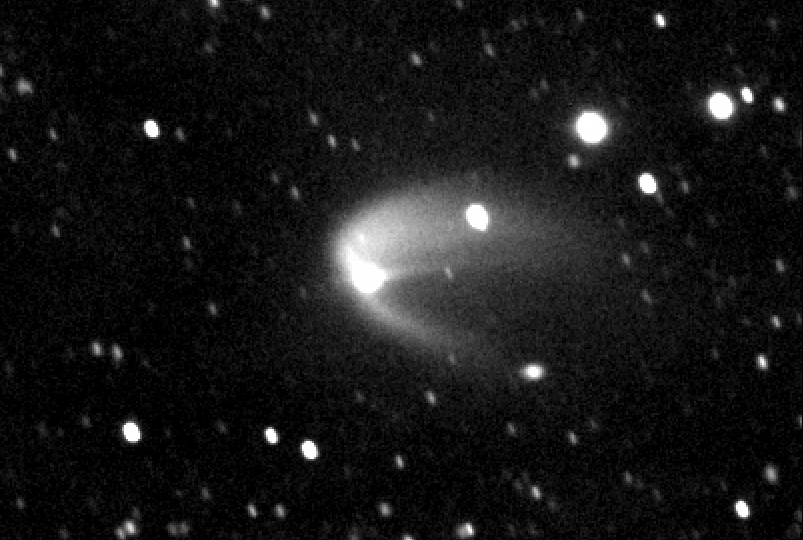

Ground-based re-discovery image of asteroid (596) Scheila

Steve Larson of the University of Arizona's Catalina Sky Survey (CSS) took this image on 11 December 2010, through the Catalina 0.68-meter Schmidt telescope. Later analysis showed the object to be a re-discovery of asteroid (596) Scheila, which was discovered in 1906. In the Larson/Gibbs 2010 image, the asteroid now showed signs of a cometary tail.

Credit: S. Larson and A. Gibbs (University of Arizona/Catalina Sky Survey)